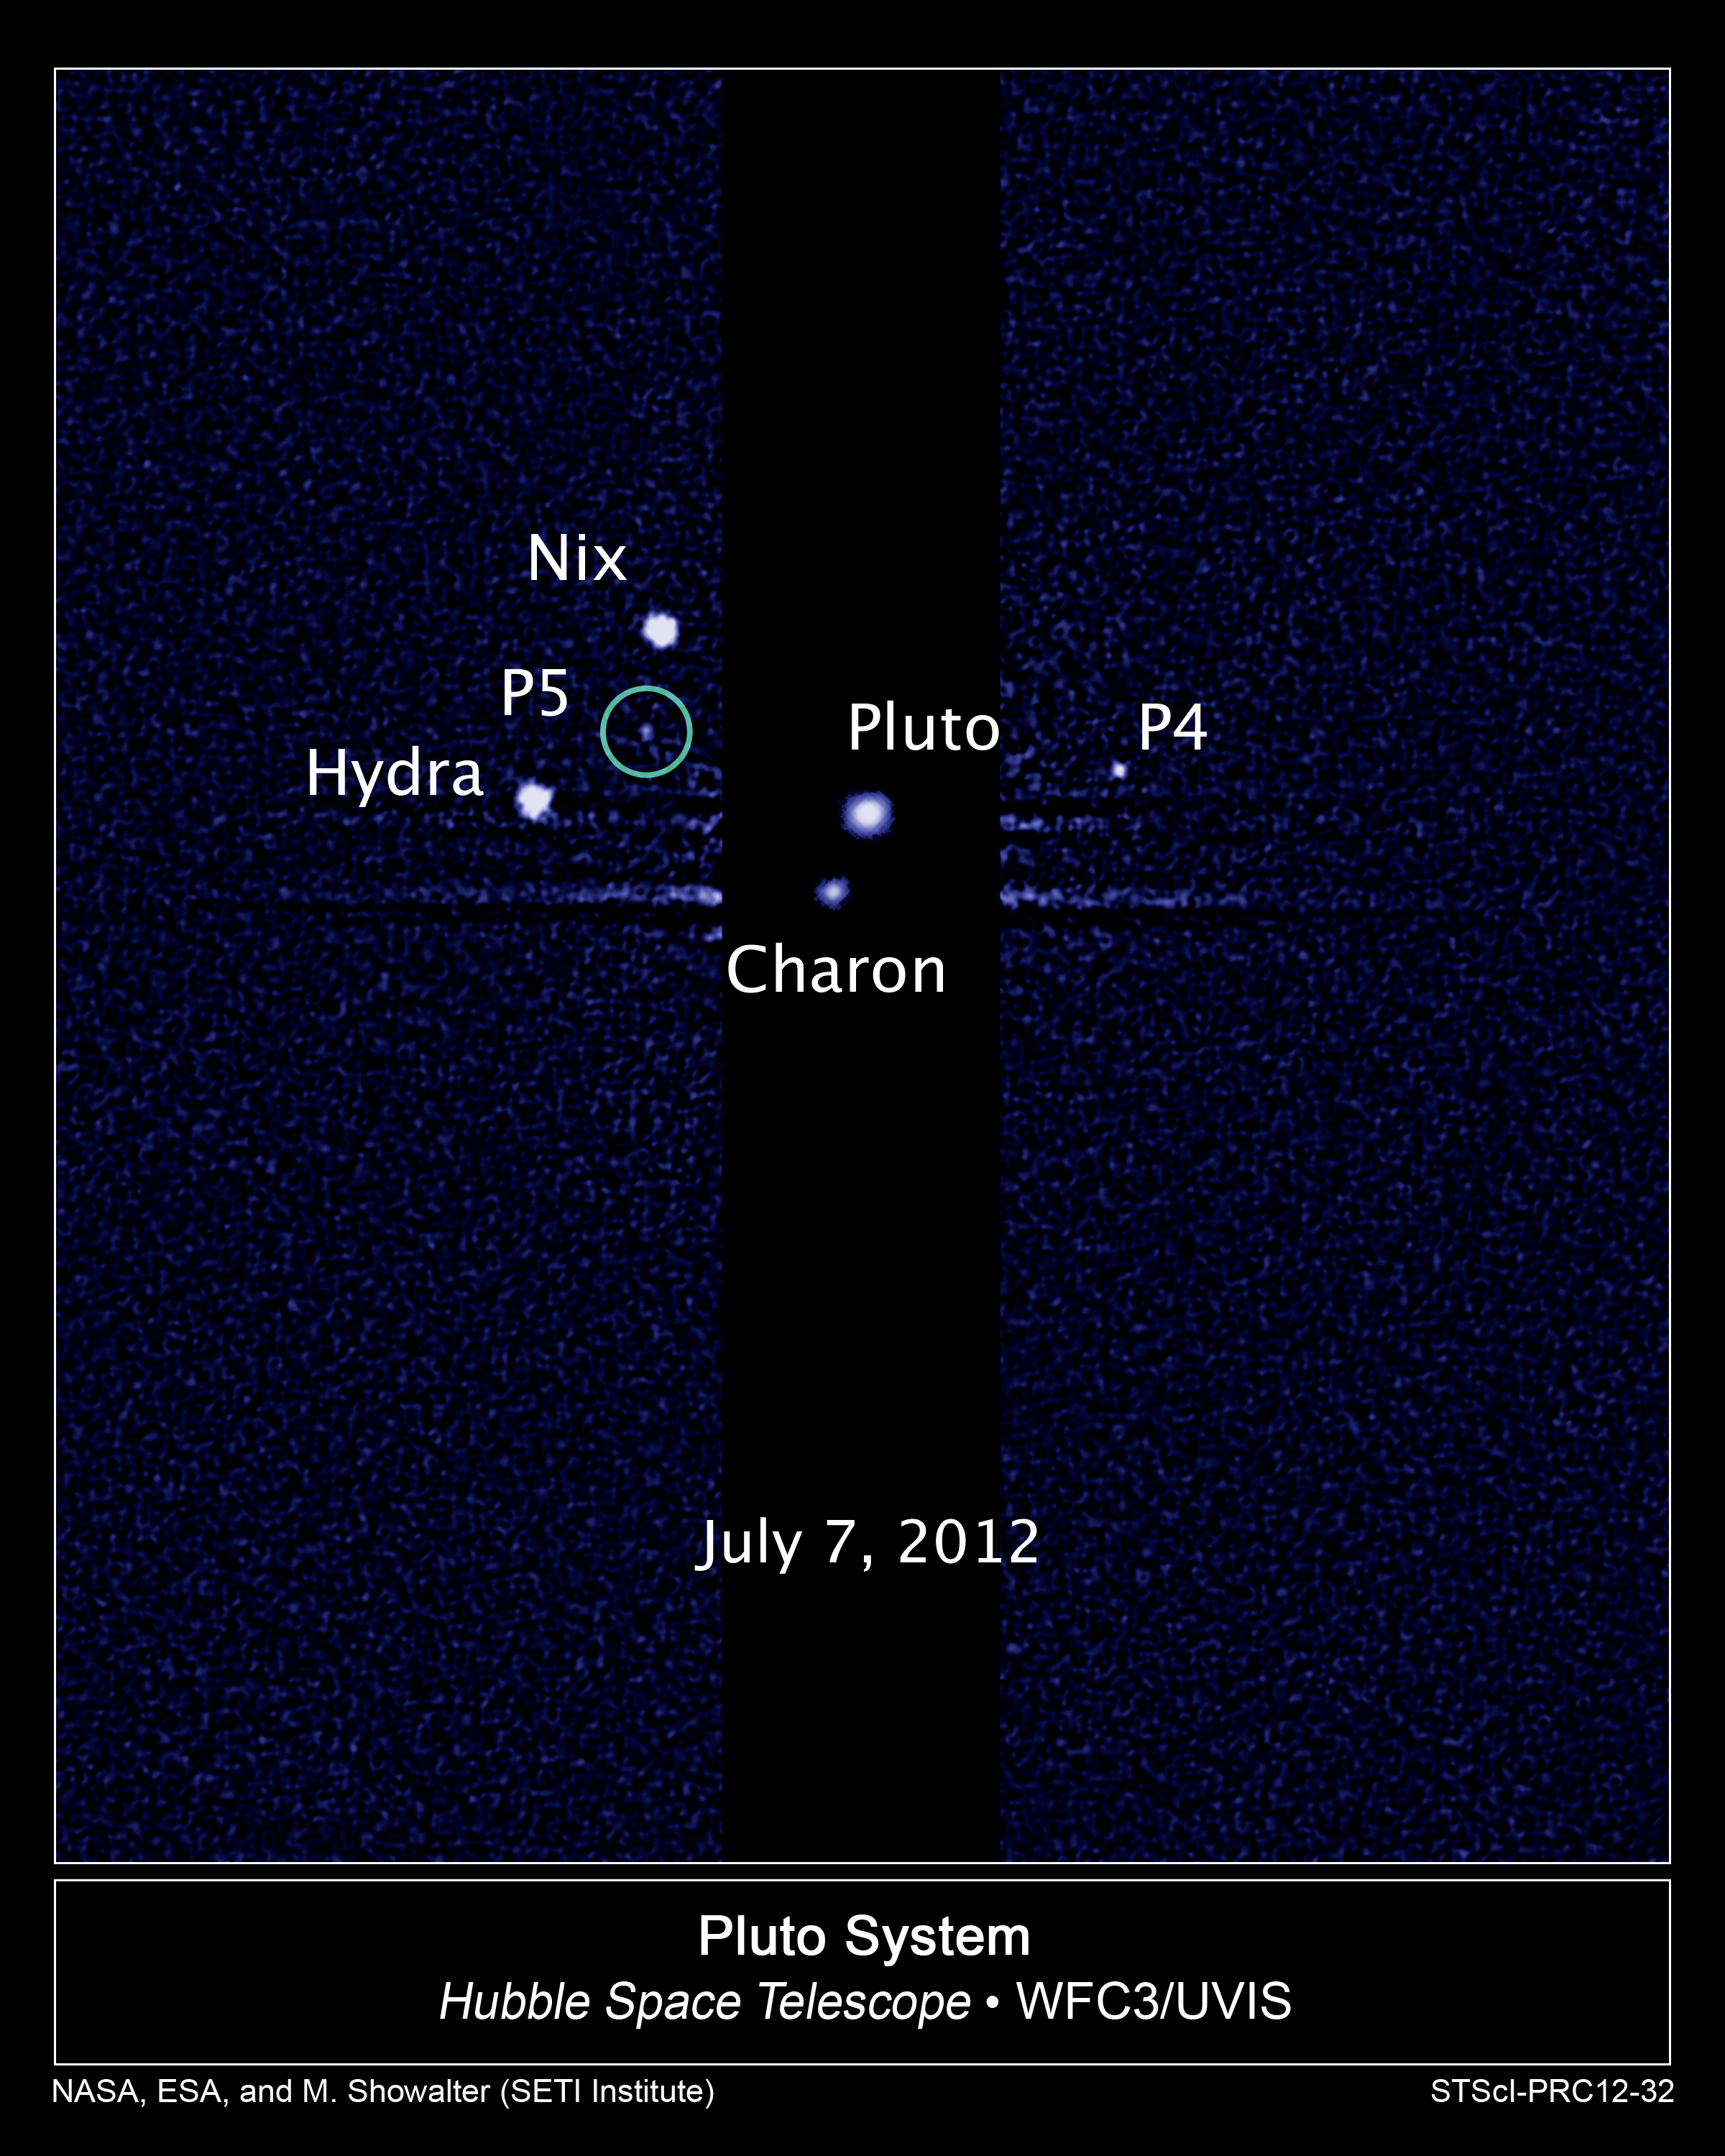

Hubble discovers a fifth moon orbiting Pluto

This image, taken by NASA's Hubble Space Telescope, shows five moons orbiting the distant, icy dwarf planet Pluto.

The green circle marks the newly discovered moon, designated P5, as photographed by Hubble's Wide Field Camera 3 on July 7.

Other observations that collectively show the moon's orbital motion were taken on 26, 27, 29 June and 9 July, 2012.

The moon is estimated to be 9 to 25 kilometres across. It is in a 93 000-kilometre-diameter circular orbit around Pluto that is assumed to be co-planar with the other satellites in the system.

The observations will help scientists in their planning for the July 2015 flyby of Pluto by NASA's New Horizons spacecraft.

Credit: NASA, ESA, and M. Showalter (SETI Institute)